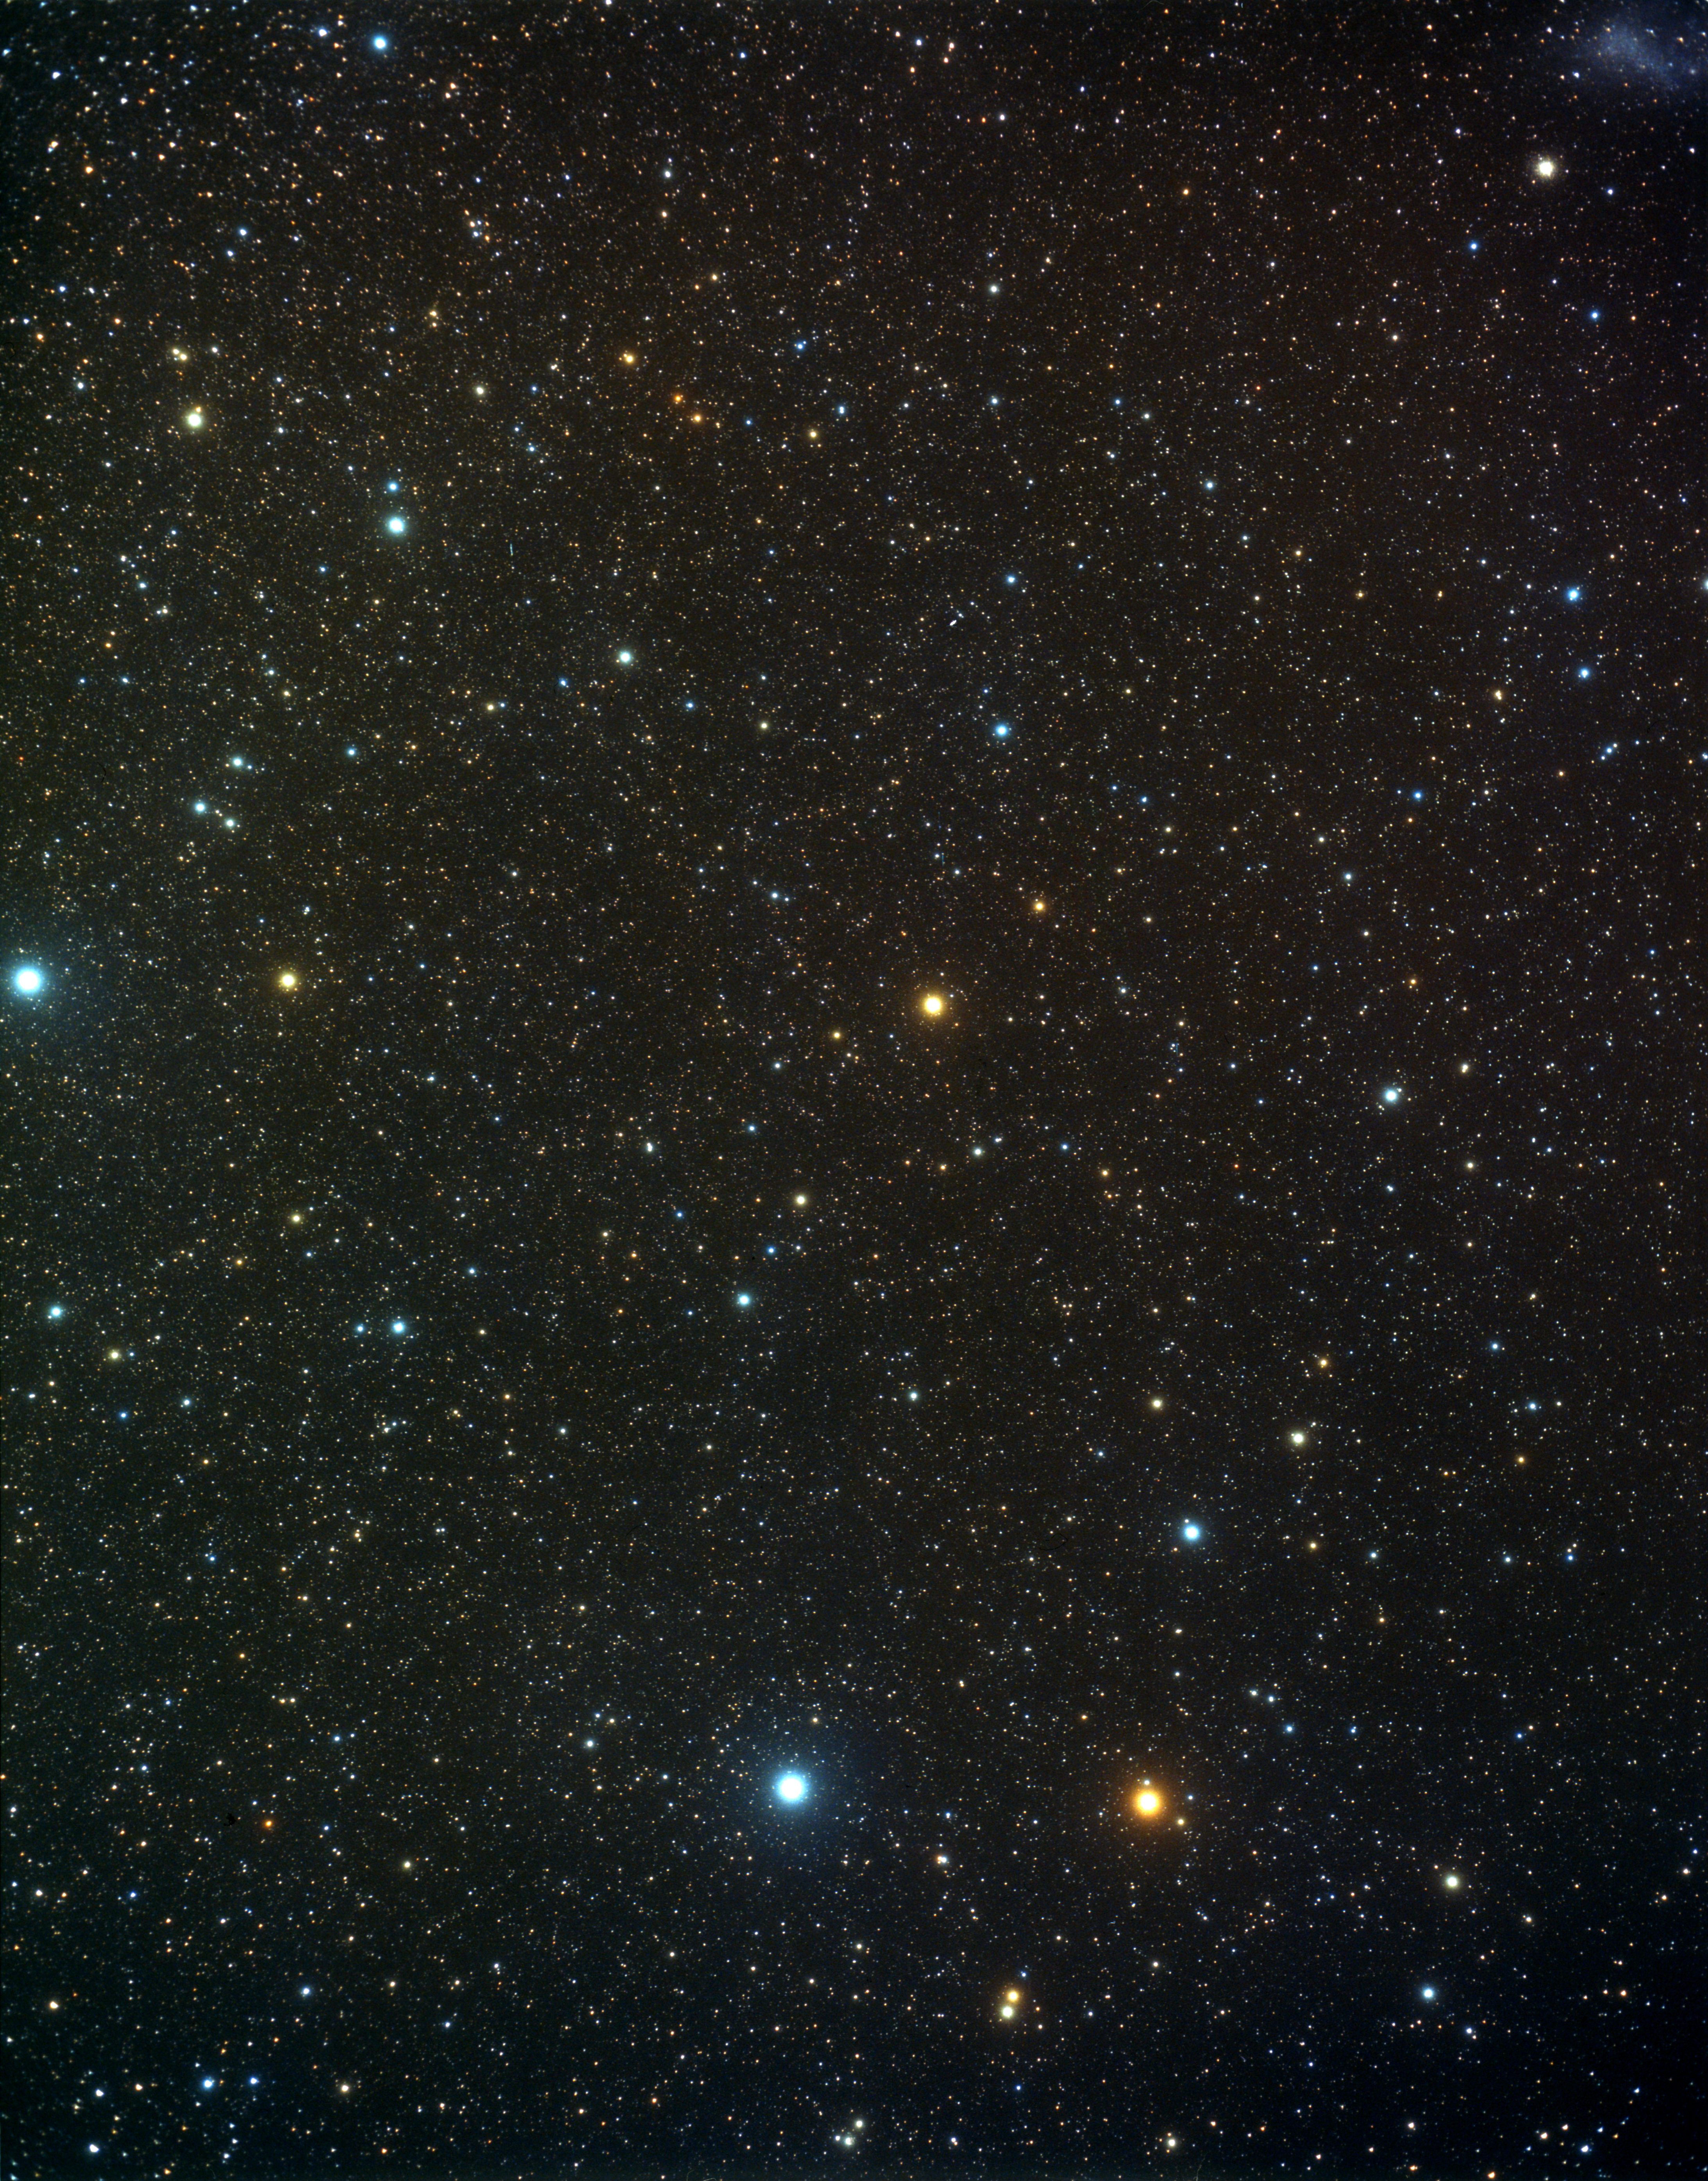

A wide-field view of the constellation of Indus (ground-based image)

This picture, taken with a small ground-based camera, shows on its central-left portion the constellation of Indus, in the southern sky.

Credit: A. Fujii